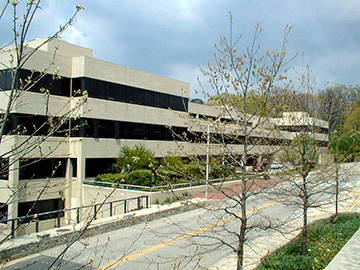

Space Telescope Science Institute

Exterior of the Space Telescope Science Institute, located in Baltimore, Maryland USA.

Credit: Publicly available